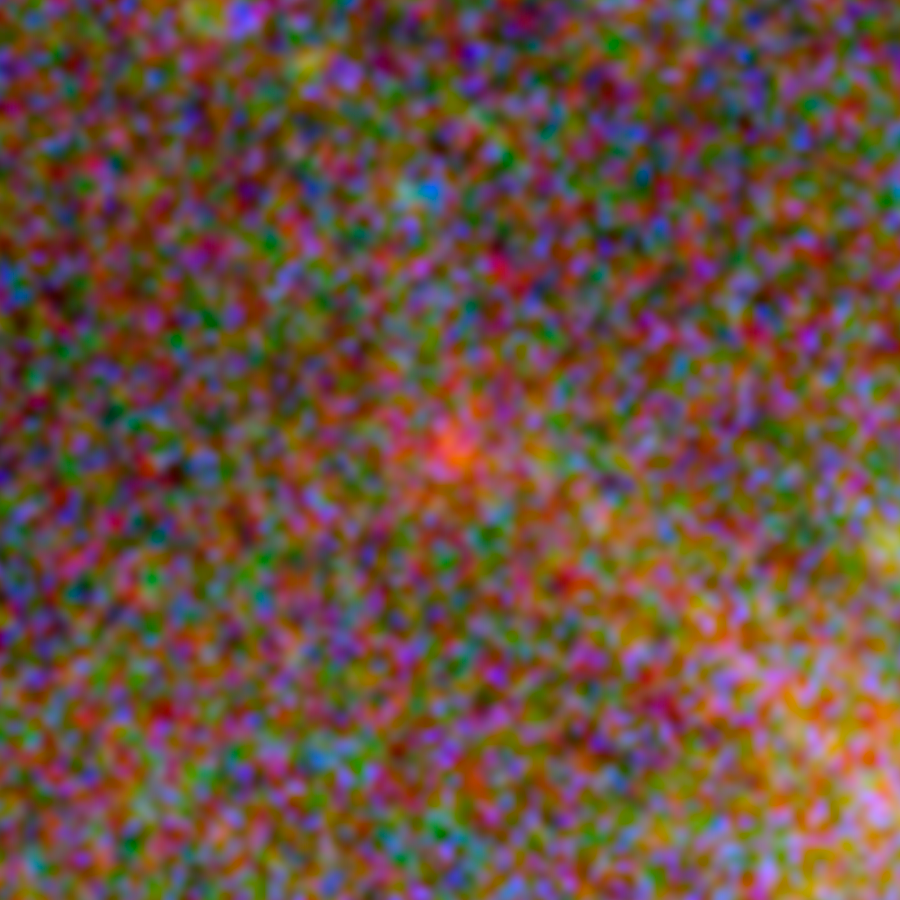

One of three magnified images of a distant galaxy (2)

This image, taken with the NASA/ESA Hubble Space Telescope, shows one of three images of the same very distant galaxy whose light has taken 13 billion years to reach us. The galaxy has been magnified and multiply imaged by the lensing effect of the galaxy cluster Abell 2744.

By measuring the angular separations between the three magnified images of the galaxy a team of astronomers were able to further constrain their measurement of the galaxy’s distance from Earth. Much like using your camera to focus on an object, and then reading its distance from you on the lens focus ring.

This makes this possibly the most reliable distance measurement yet of an object that existed in the Universe’s formative years.

Credit: NASA, ESA Acknowledgement: A. Zitrin (California Institute of Technology, USA)